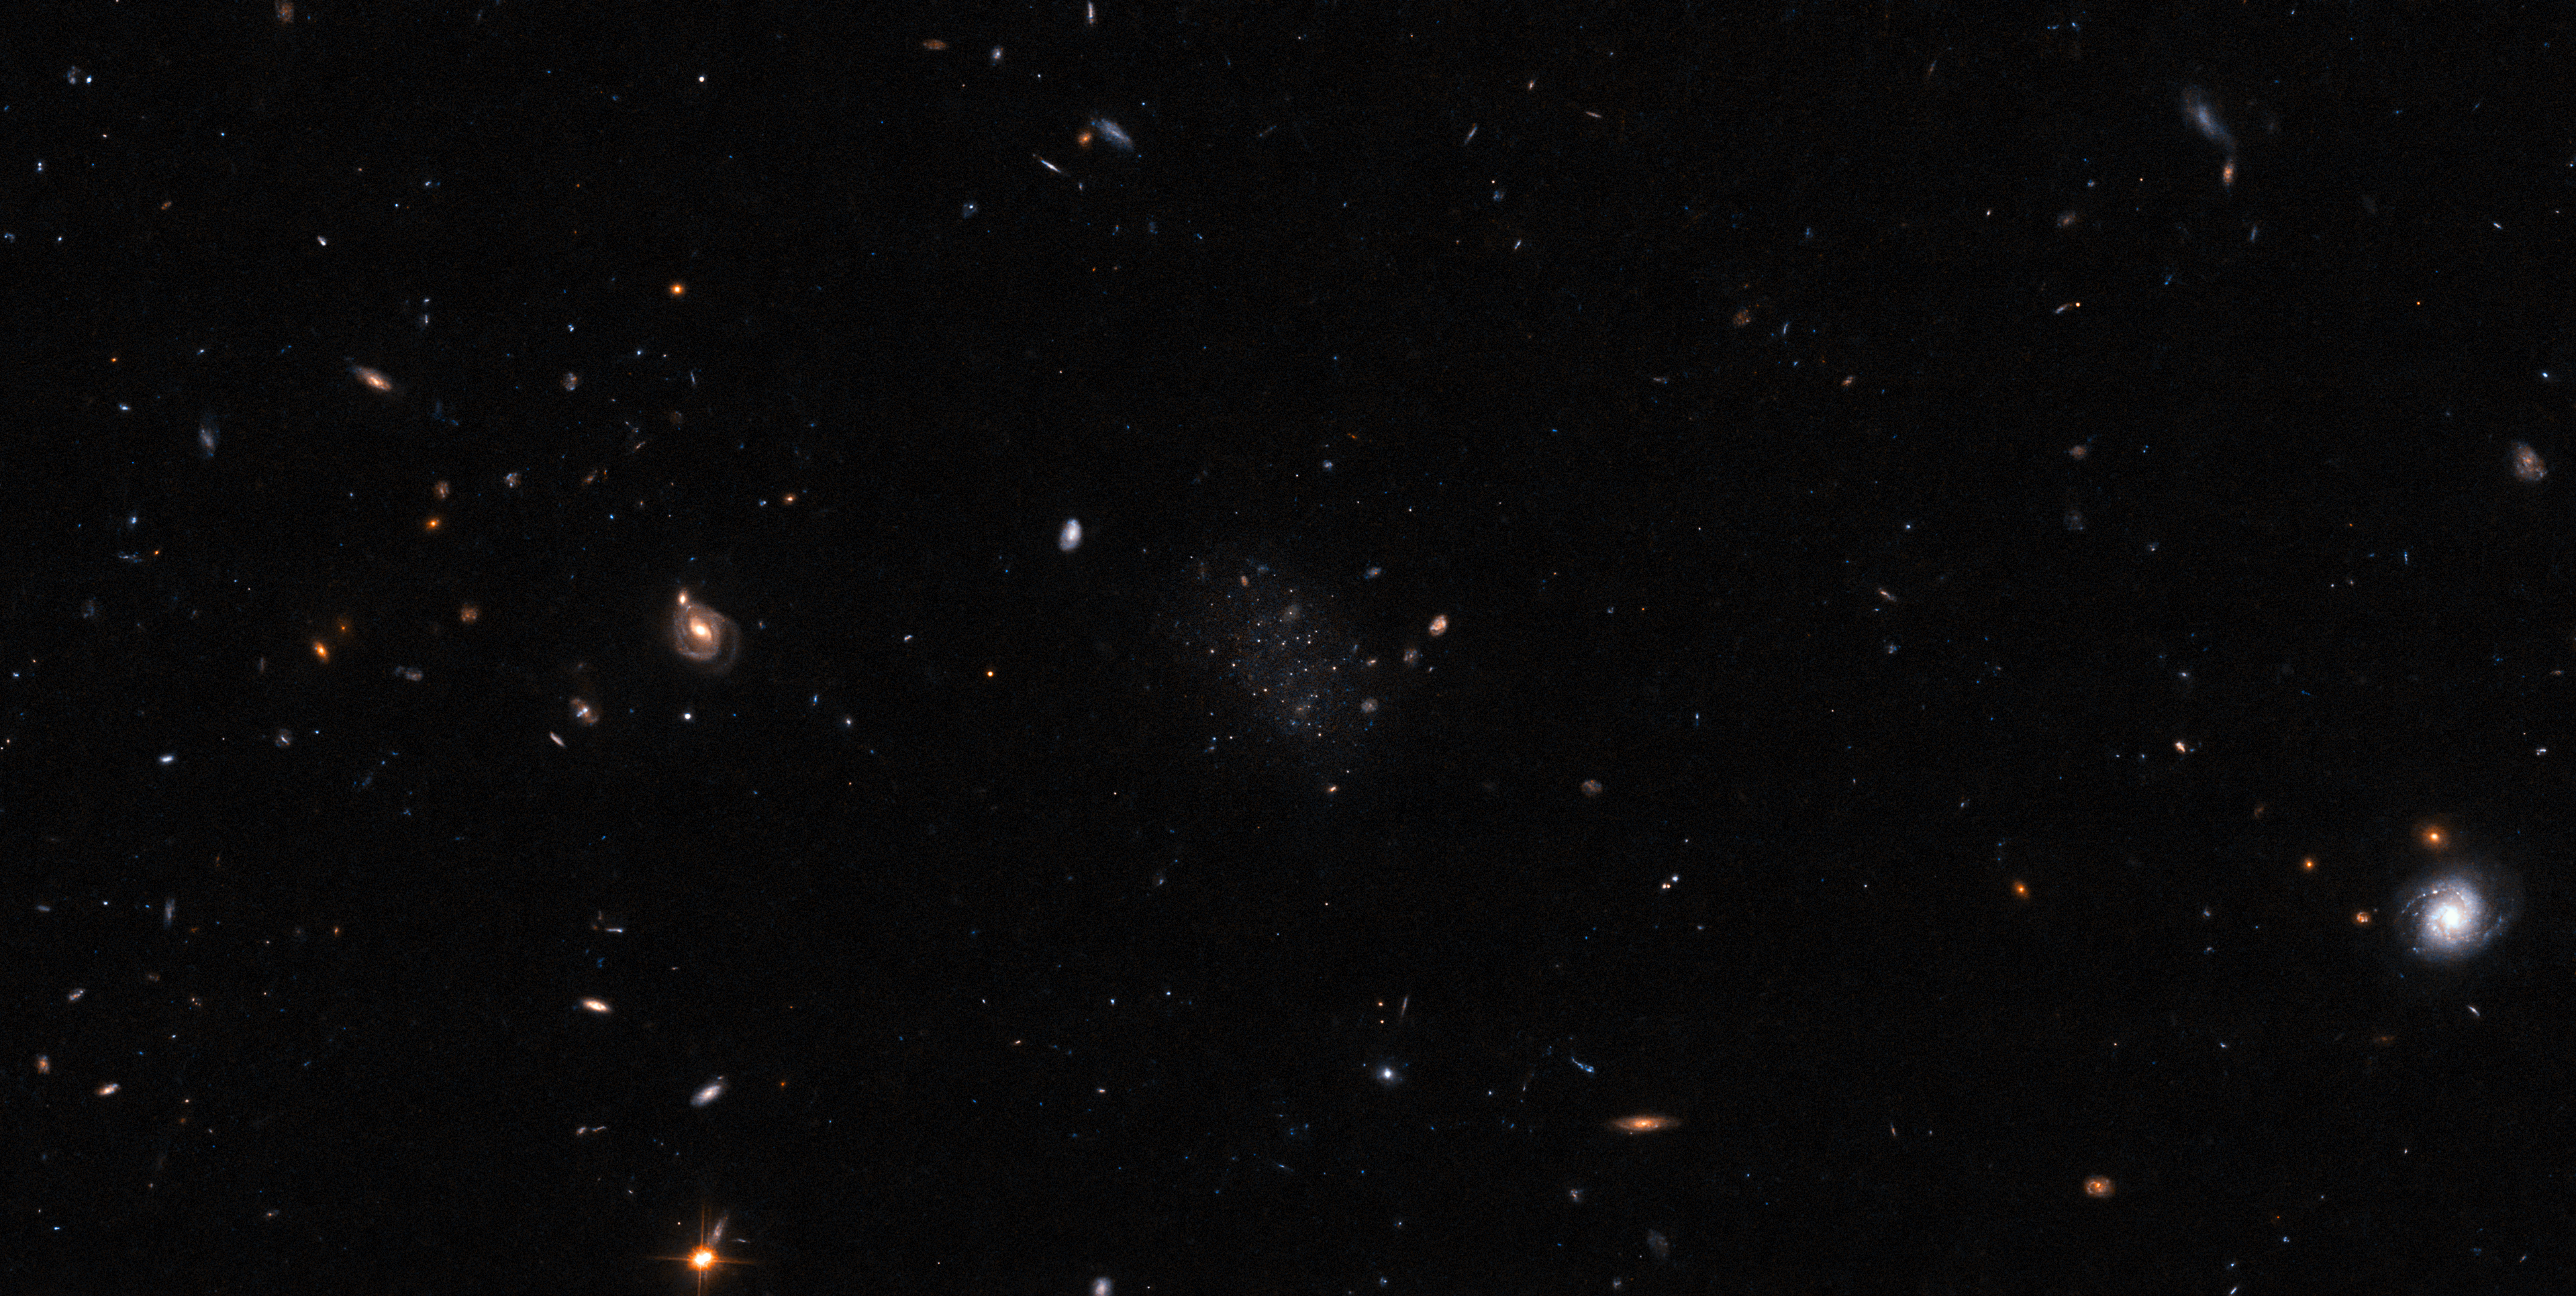

Can You Spot It?

Right in the middle of this image, nestled amongst a smattering of distant stars and even more distant galaxies, lies the newly discovered dwarf galaxy known as Donatiello II. If you cannot quite distinguish the clump of faint stars that is all we can see of Donatiello II in this image, then you are in good company. Donatiello II is one of three newly discovered galaxies that were so difficult to spot that they were all missed by an algorithm designed to search astronomical data for potential galaxy candidates. Even the best algorithms have their limitations when it comes to distinguishing very faint galaxies from individual stars and background noise. In these most challenging identification cases, discovery has to be done the old-fashioned way — by a dedicated human trawling through the data themselves.

The data that enabled these discoveries was collected by the Dark Energy Survey (DES), an intense observation effort that spanned six years, and was carried out using the Dark Energy Camera (DECam), which is mounted on the Víctor M. Blanco 4-metre Telescope at Cerro Tololo Inter-American Observatory, a Program of NSF’s NOIRLab. As is the case for most major telescopes that receive public funding, the DES data were made available to the public. That is when the experienced amateur astronomer Giuseppe Donatiello stepped in. He laboriously processed and analysed chunks of the DES data, and made his discovery — three very faint galaxies, now named Donatiello II, III and IV respectively. All three are satellites of the well known Sculptor galaxy (otherwise known as NGC 253), meaning that they are all bound gravitationally to their much more massive companion.

This image comes from an observing programme from the NASA/ESA Hubble Space Telescope. Based on their own independent search, a team led by Burçin Mutlu-Pakdil used Hubble to obtain long-exposure images of several faint galaxies, including Donatiello II. With the Hubble images, they were able to confirm their target galaxies’ association with NGC 253 — thereby providing both an independent confirmation of Donatiello’s discovery, and this new Picture of the Week.

Credit: ESA/Hubble & NASA, B. Mutlu-Pakdil Acknowledgement: G. Donatiello